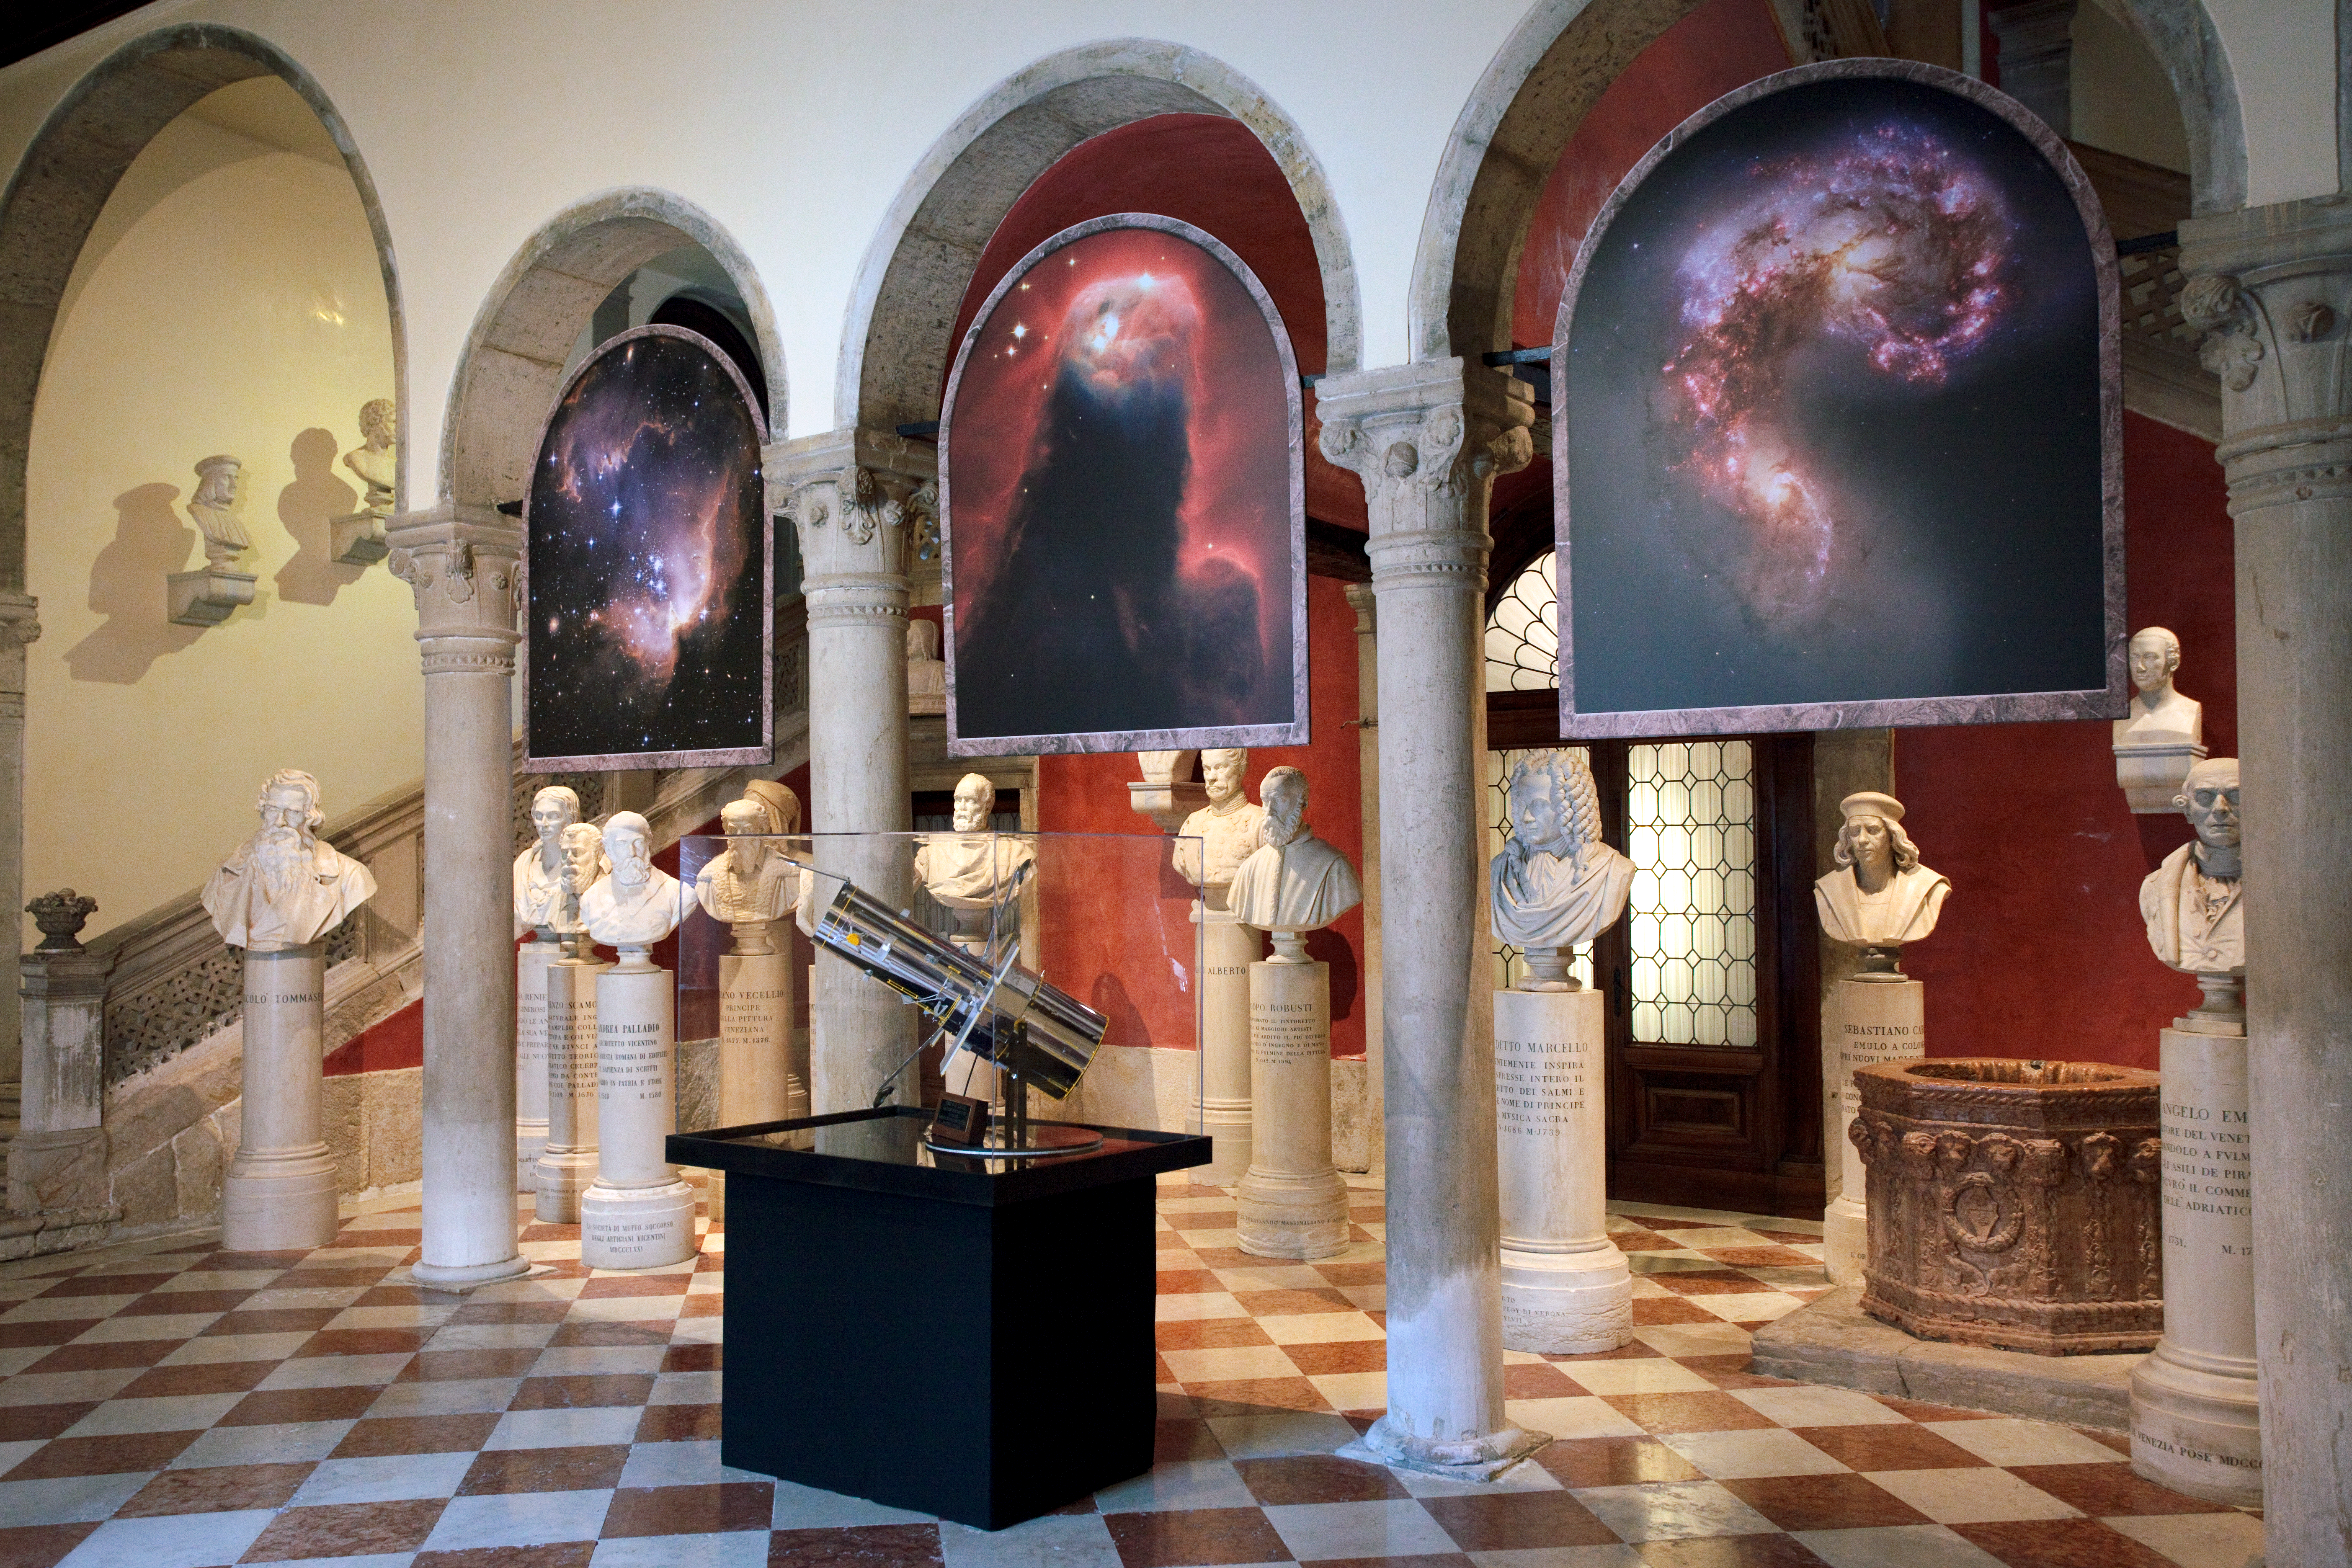

Hubble exhibition

This image shows a model of the NASA/ESA Hubble Space Telescope, alongside some of its most famous images at the “Il telescopio spaziale Hubble alle frontiere dell’universo” exhibition in Venice, Italy in October 2010.

Credit: ESA/Hubble